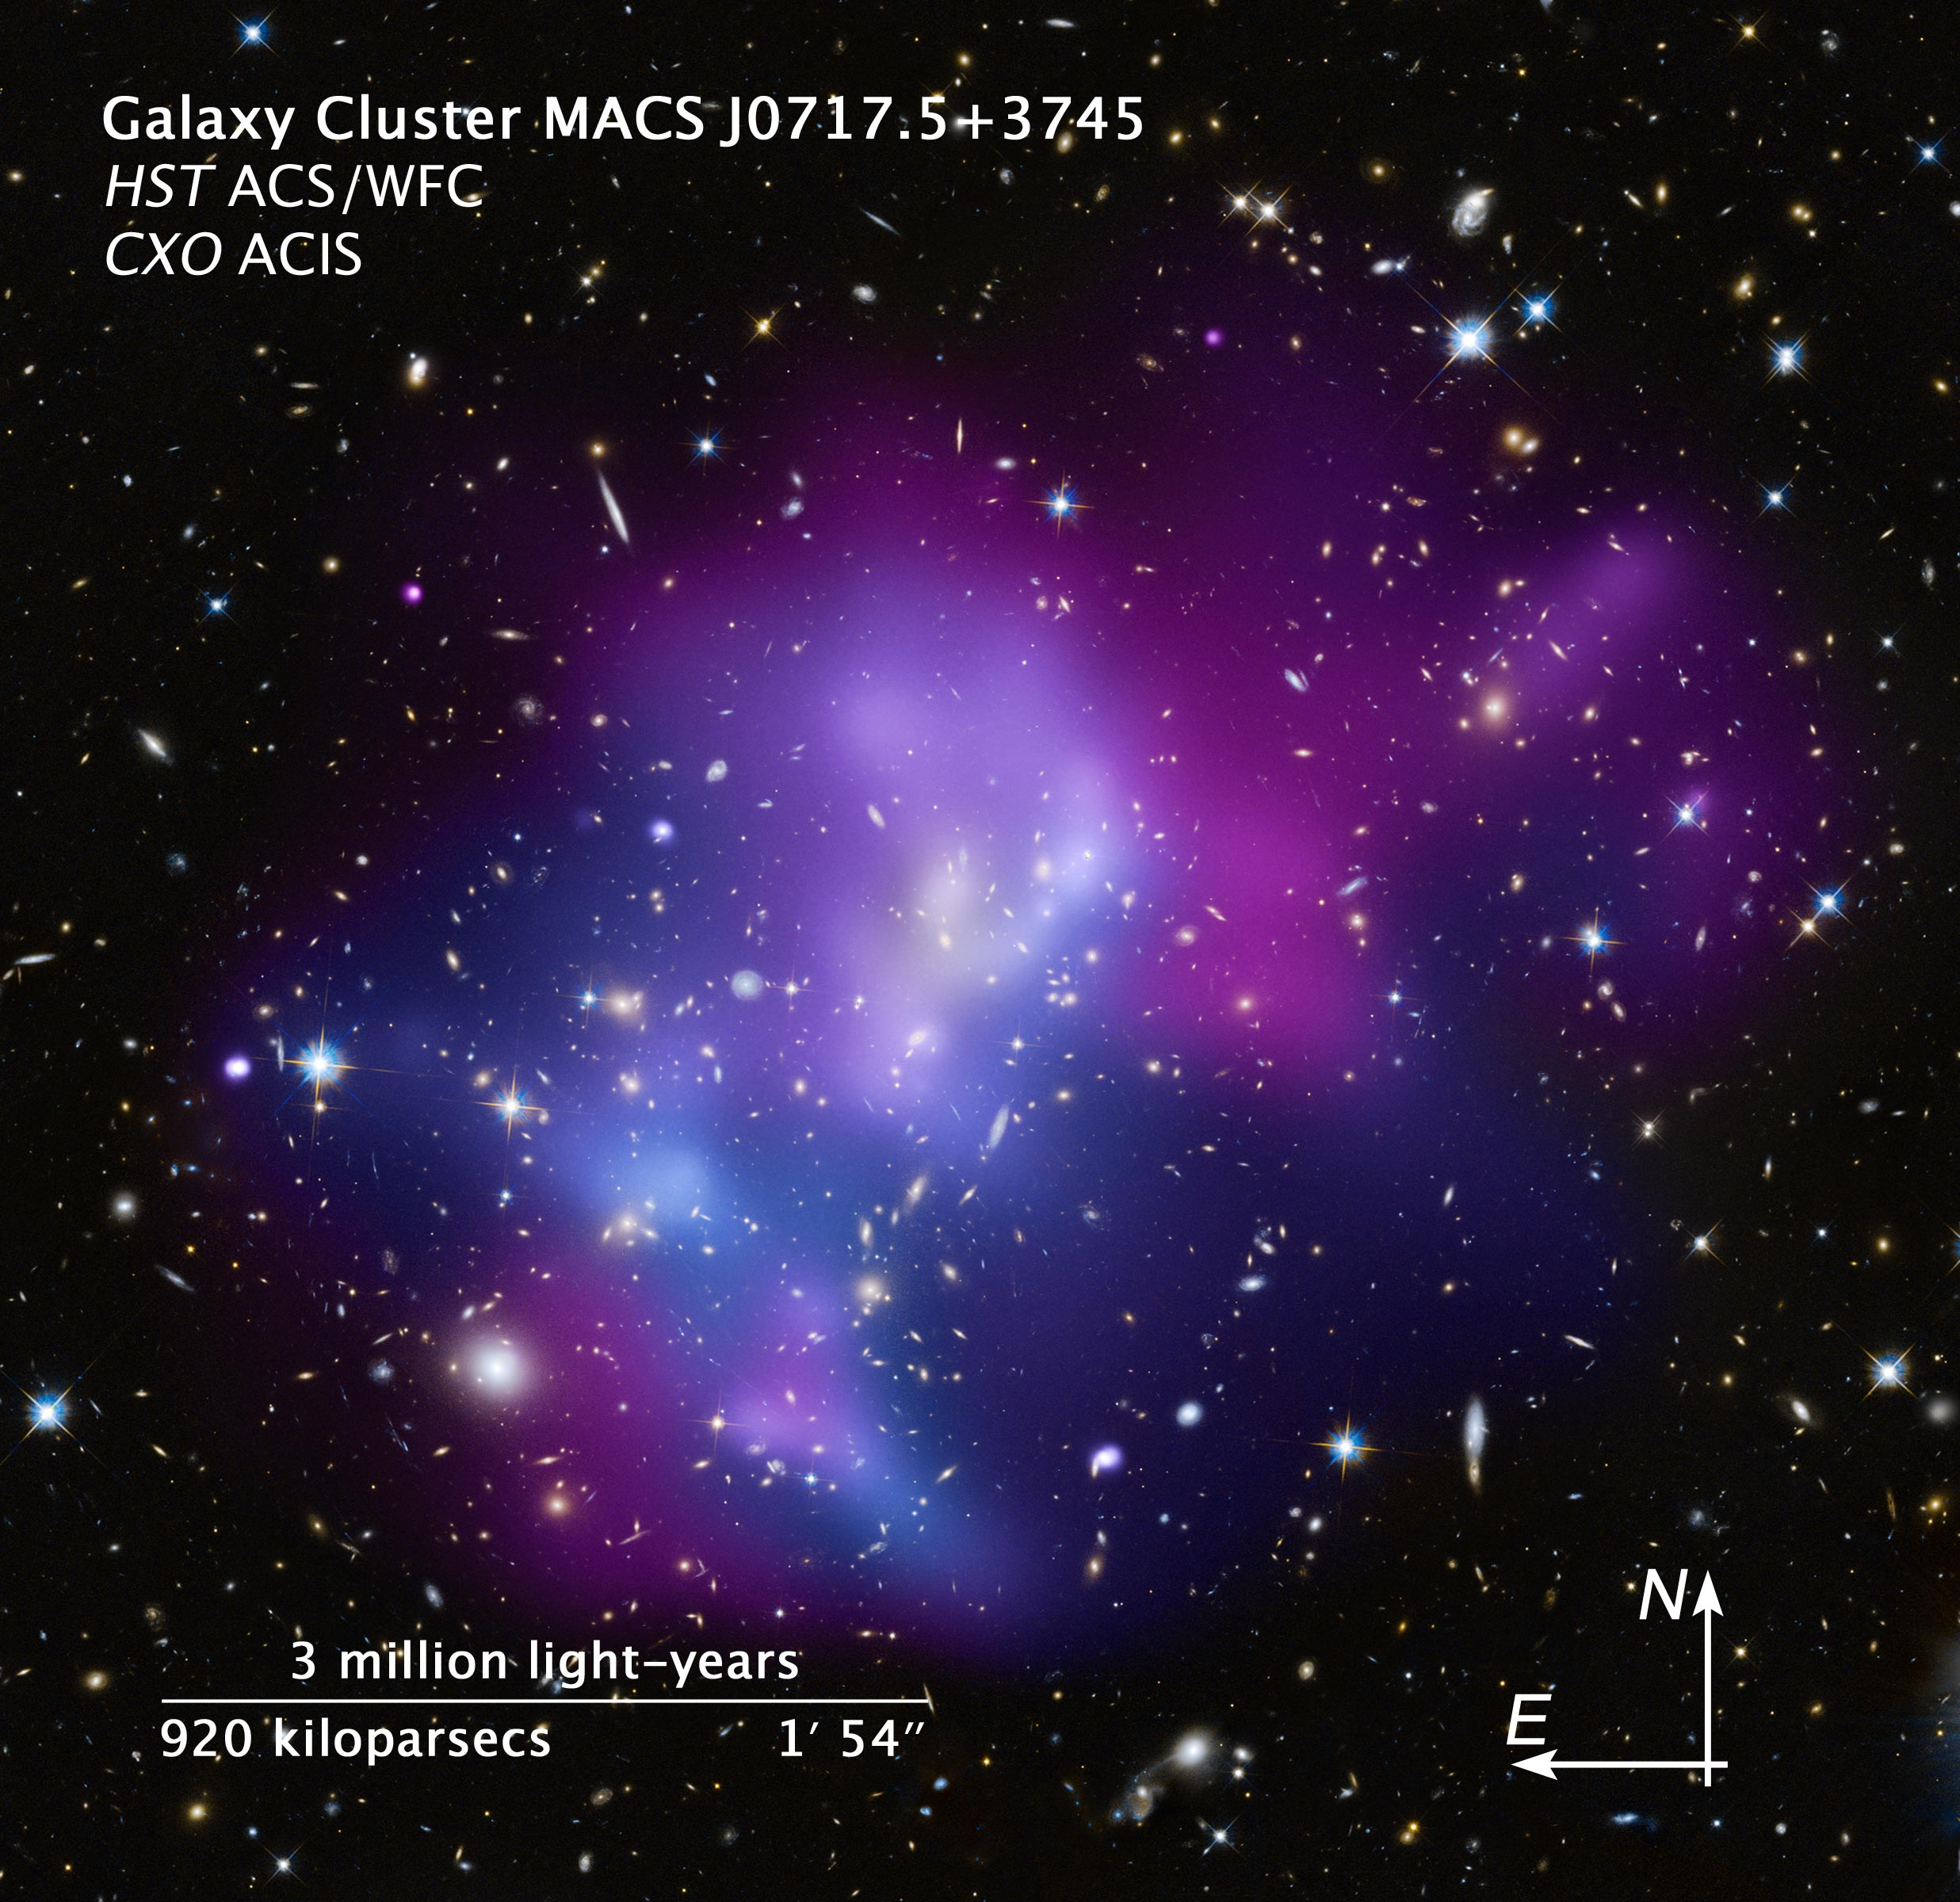

Compass and scale image of MACS J0717

This image, composod out of pictures taken from the ESO/NASA Hubble Space Telescope and from NASA's Chandra X-ray Observatory, shows the galacy cluster MACS J0717.5+3745. This cluster originally consited out of four separate clusters, which were combined through a collision into a single one. This makes it one of the most complex galaxy clusters ever seen.

In the image galaxies and stars alike are shown in the visual light, collected by the NASA/ESA Hubble Space Telescope, whereas the hot gas in between the galaxies was observed by the Chandra X-ray Observatory. The temperature of the observed gas is represented in the colors of the image: the coolest gas is shown in reddish-purple and hottest gas in blue; temperatures in between are purple.

Credit: NASA, ESA and Z. Levay (STScI)